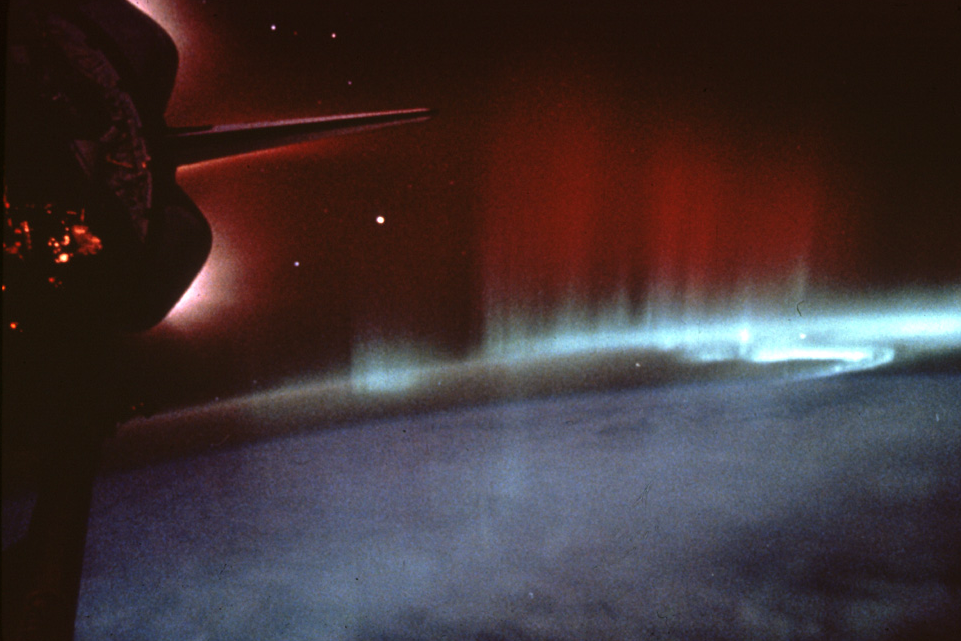

Shuttle Photos Of Earth's Auroras

Earth's magnetosphere protects us from charged solar particles, resulting in auroras, and the shuttle crew capture the moment for posterity.

Credit: NASA & ESA